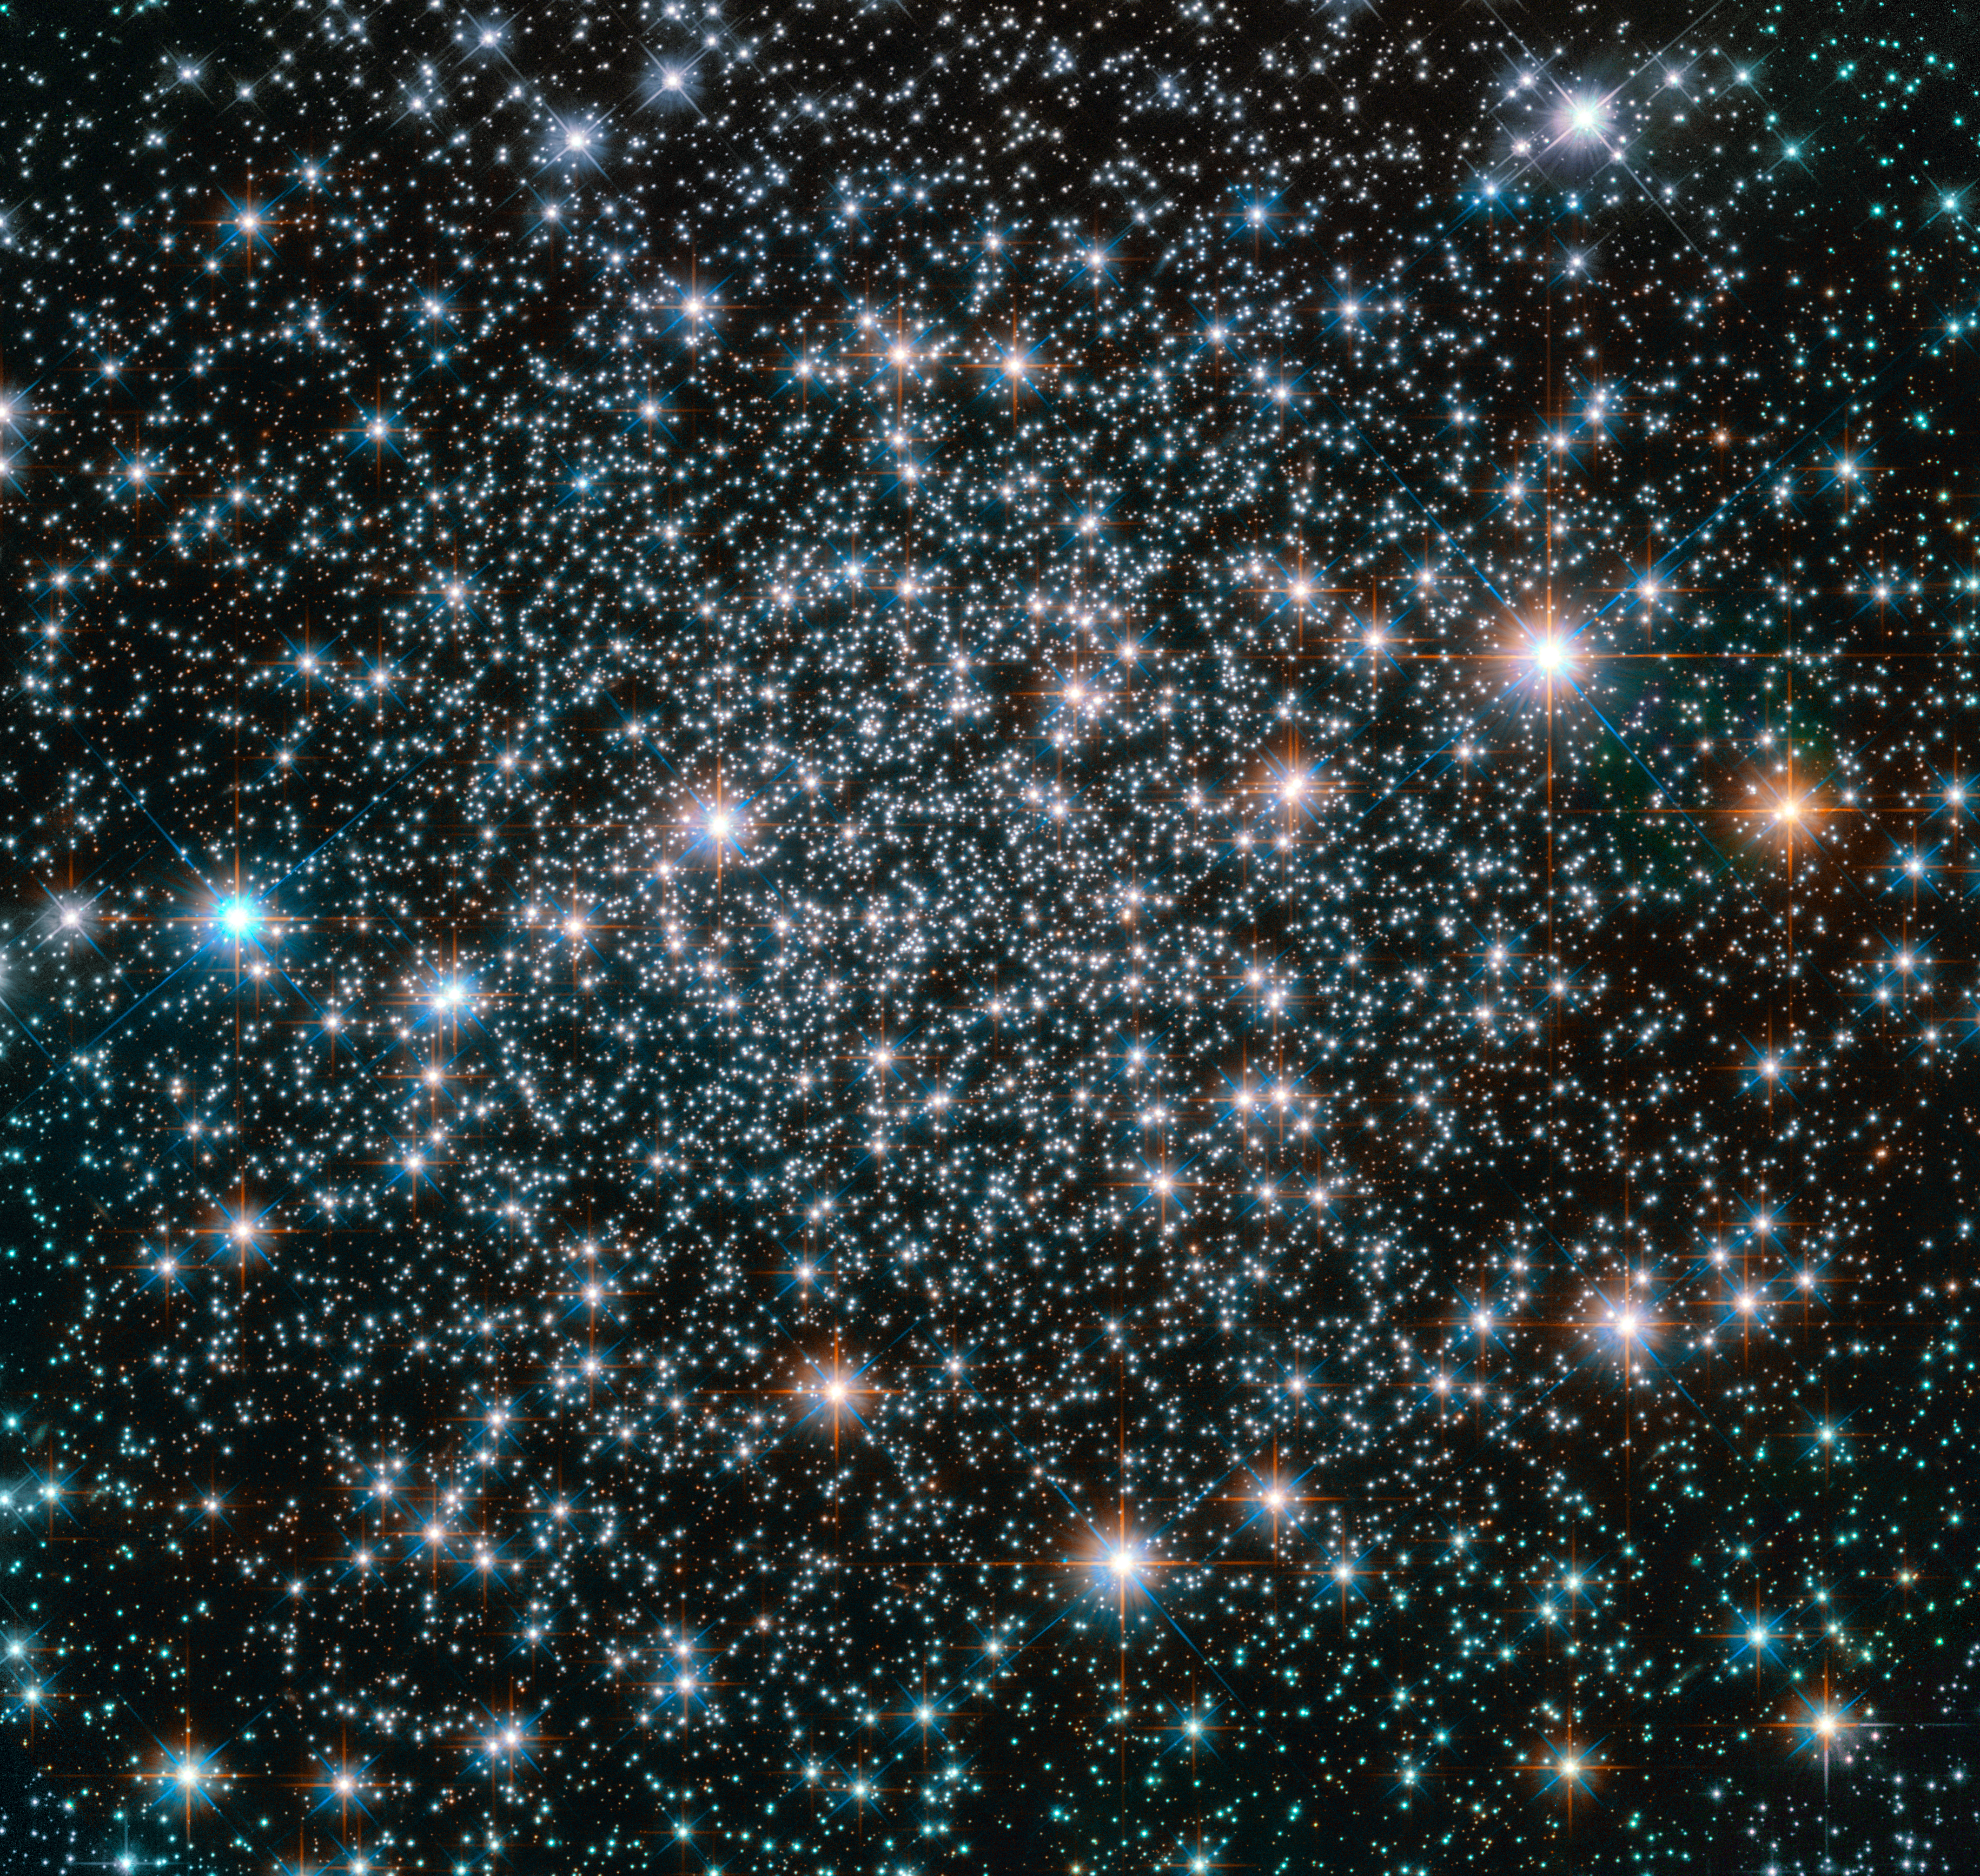

A heavy-metal home

This 10.5-billion-year-old globular cluster, NGC 6496, is home to heavy-metal stars of a celestial kind! The stars comprising this spectacular spherical cluster are enriched with much higher proportions of metals — elements heavier than hydrogen and helium, are in astronomy curiously known as metals — than stars found in similar clusters.

A handful of these high-metallicity stars are also variable stars, meaning that their brightness fluctuates over time. NGC 6496 hosts a selection of long-period variables — giant pulsating stars whose brightness can take up to, and even over, a thousand days to change — and short-period eclipsing binaries, which dim when eclipsed by a stellar companion.

The nature of the variability of these stars can reveal important information about their mass, radius, luminosity, temperature, composition, and evolution, providing astronomers with measurements that would be difficult or even impossible to obtain through other methods.

NGC 6496 was discovered in 1826 by Scottish astronomer James Dunlop. The cluster resides at about 35 000 light-years away in the southern constellation of Scorpius (The Scorpion).

Credit: ESA/Hubble & NASA
Acknowledgement: Judy Schmidt (Geckzilla)